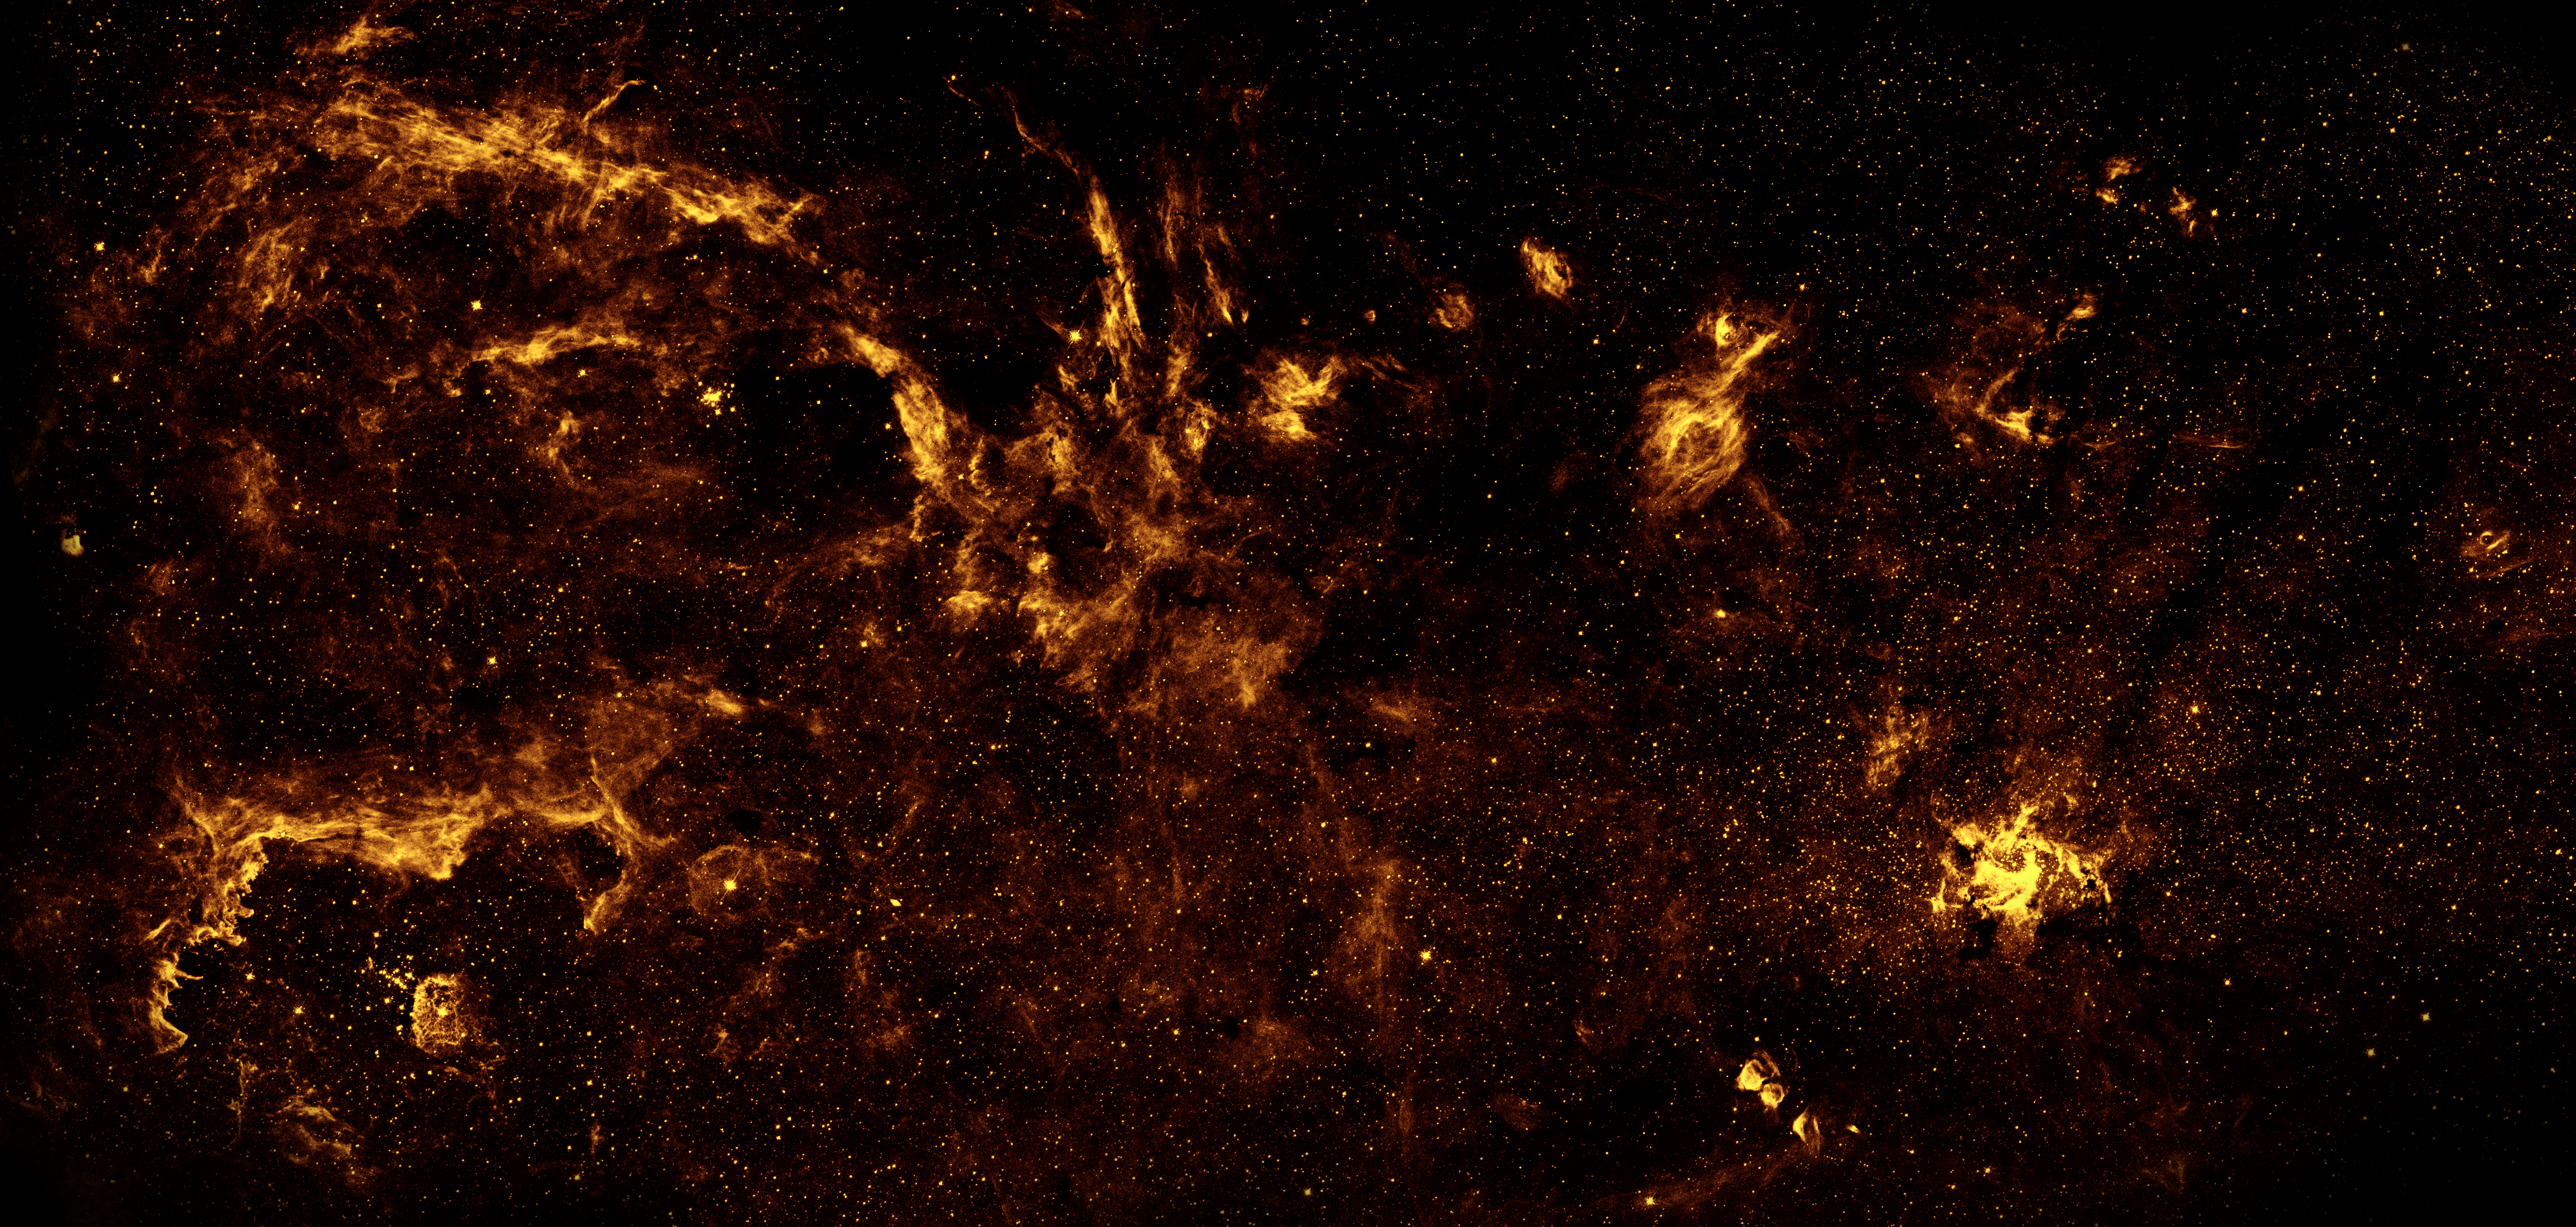

Galactic centre region in near-infrared from Hubble

Although best known for its visible-light images, the Hubble Space Telescope also observes over a limited range of infrared light. The galactic centre is marked by the bright patch in the lower right. Along the left side are large arcs of warm gas that have been heated by clusters of bright massive stars. In addition, Hubble uncovered many more massive stars across the region. Winds and radiation from these stars create the complex structures seen in the gas throughout the image. This sweeping panorama is the sharpest infrared picture ever made of the galactic centre region.

Credit: NASA, ESA, Q.D. Wang (Univ. of Massachusetts, Amherst, USA) and STScI